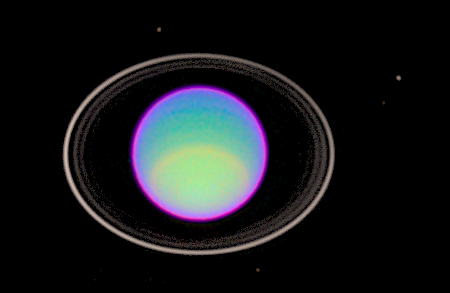

Hazy Layers on Uranus

Hubble Space Telescope has peered deep into Uranus' atmosphere to see clear and hazy layers created by a mixture of gases. Using infrared filters, Hubble captured detailed features of three layers of Uranus' atmosphere.

Credit: Erich Karkoschka (University of Arizona Lunar & Planetary Lab)and NASA/ESA